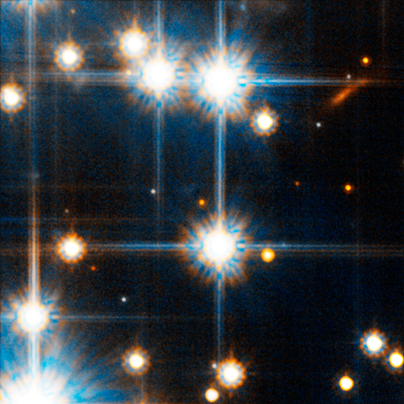

Faint Red Star in NGC 6397

The image shows the faintest red dwarf star spied by Hubble in globular cluster NGC 6397 (right above the very bright star in the centre of the image). The Advanced Camera found the faintest red dwarf stars (26th magnitude), which are cooler and much lower in mass than our Sun, and the dimmest white dwarfs (28th magnitude), the burned-out relics of normal stars. The light from the dimmest white dwarfs is equal to the light produced by a birthday candle on the Moon as seen from Earth.

Credit: NASA, ESA and H. Richer (University of British Columbia)